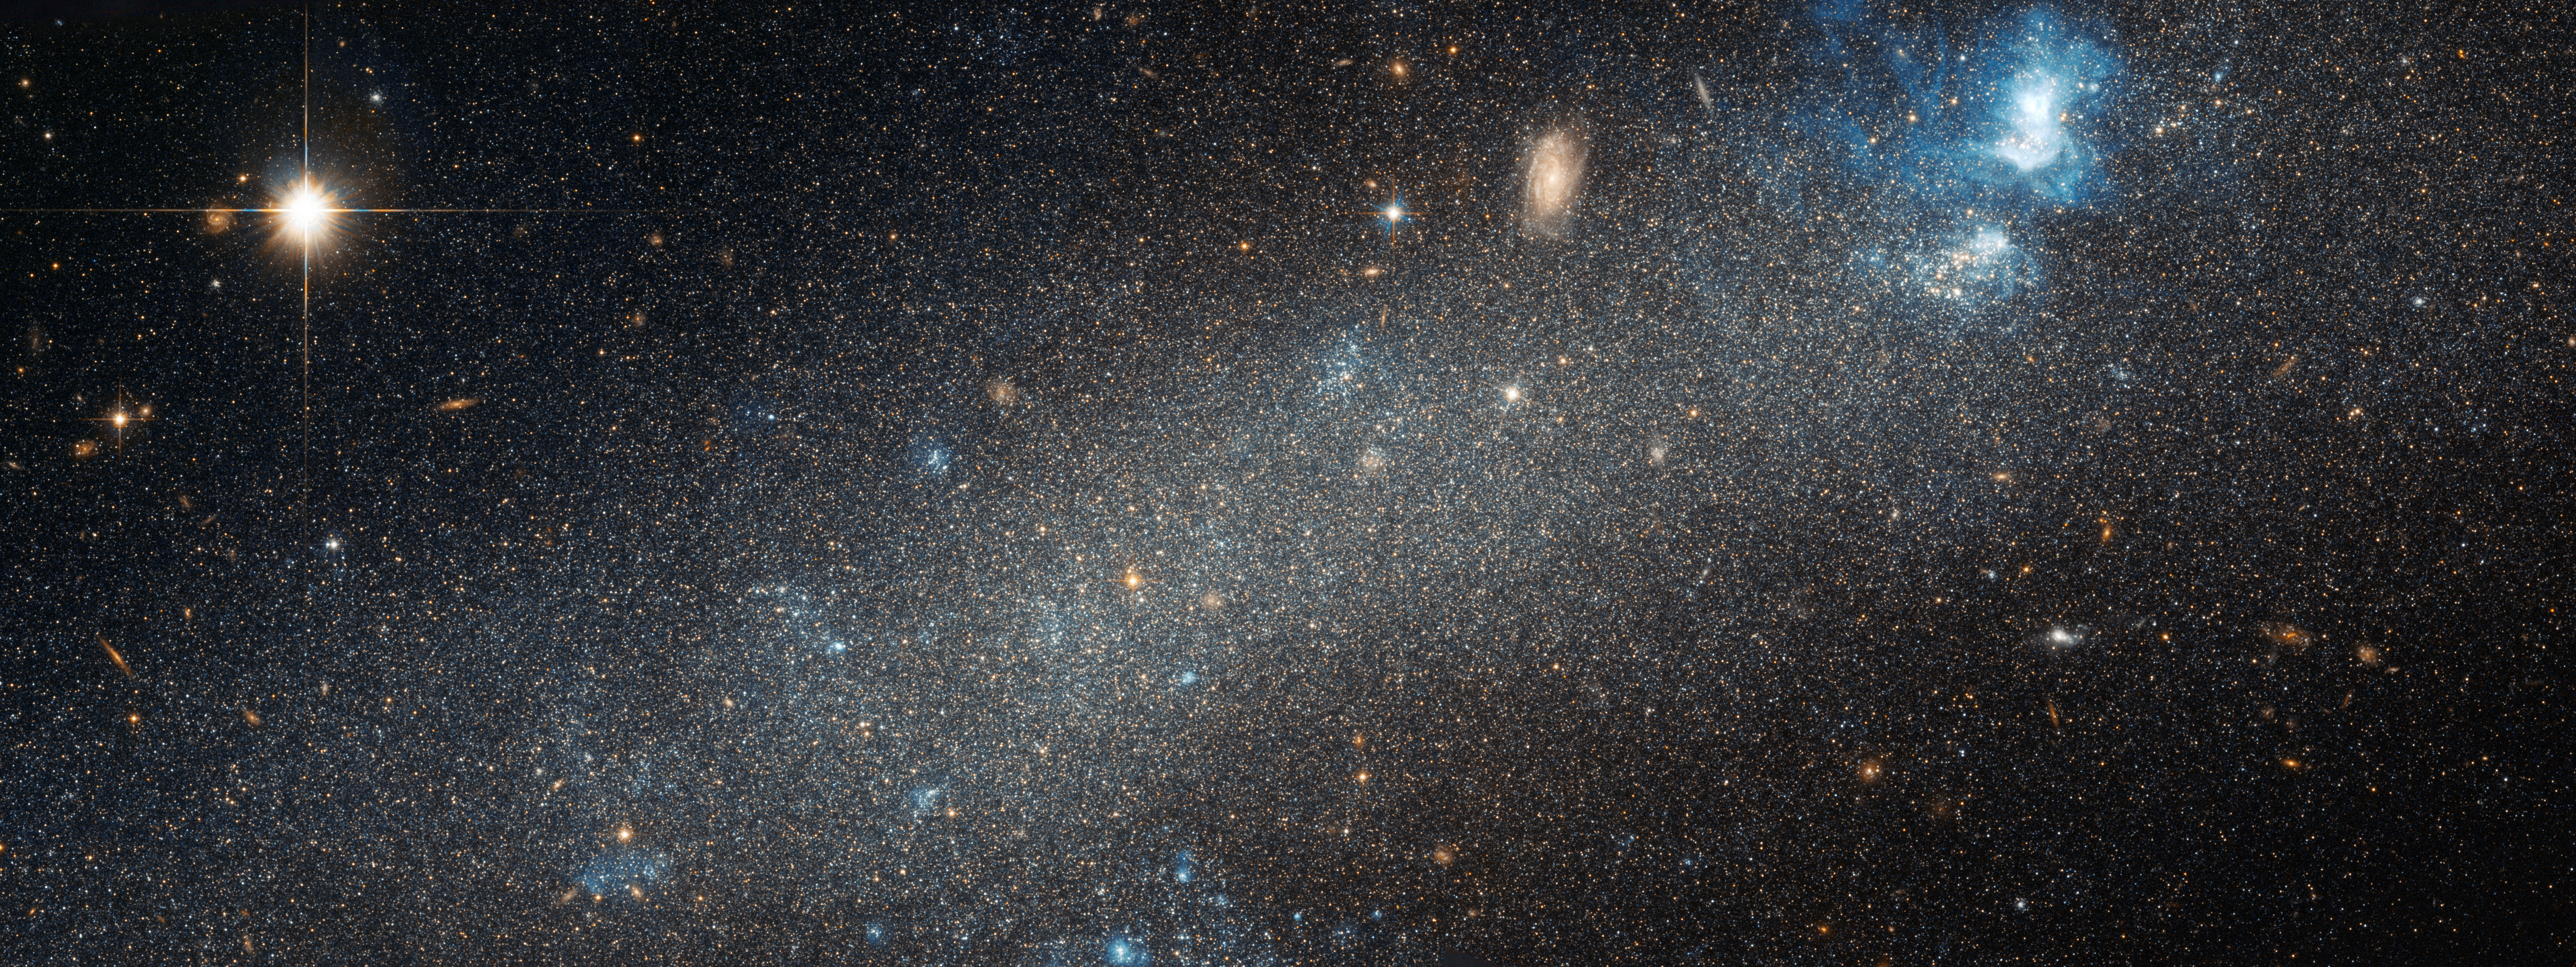

Hubble view of NGC 2366

The NASA/ESA Hubble Space Telescope has made detailed observations of the dwarf galaxy NGC 2366. While it lacks the elegant spiral arms of many larger galaxies, NGC 2366 is home to a bright, star-forming nebula and is close enough for astronomers to discern its individual stars.

Credit: NASA & ESA